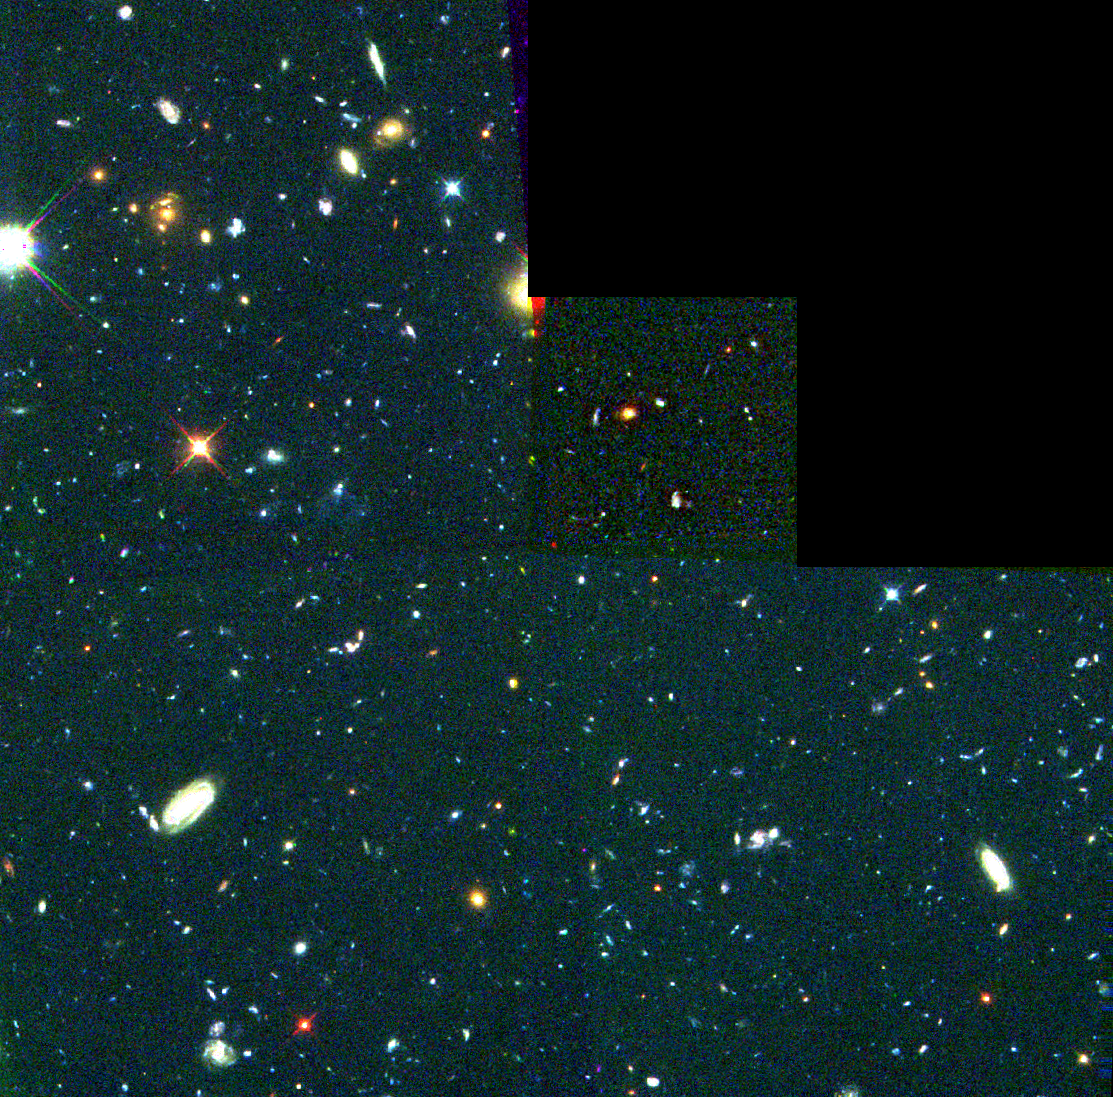

Hubble's View of 18 Proto Galaxies

Embedded in this Hubble Space Telescope image of nearby and distant galaxies are 18 young galaxies or galactic building blocks, each containing dust, gas, and a few billion stars.

Each of these objects is 11 billion light-years from Earth and much smaller than today's galaxies.

Credit: Rogier Windhorst and Sam Pascarelle (Arizona State University) and NASA/ESA